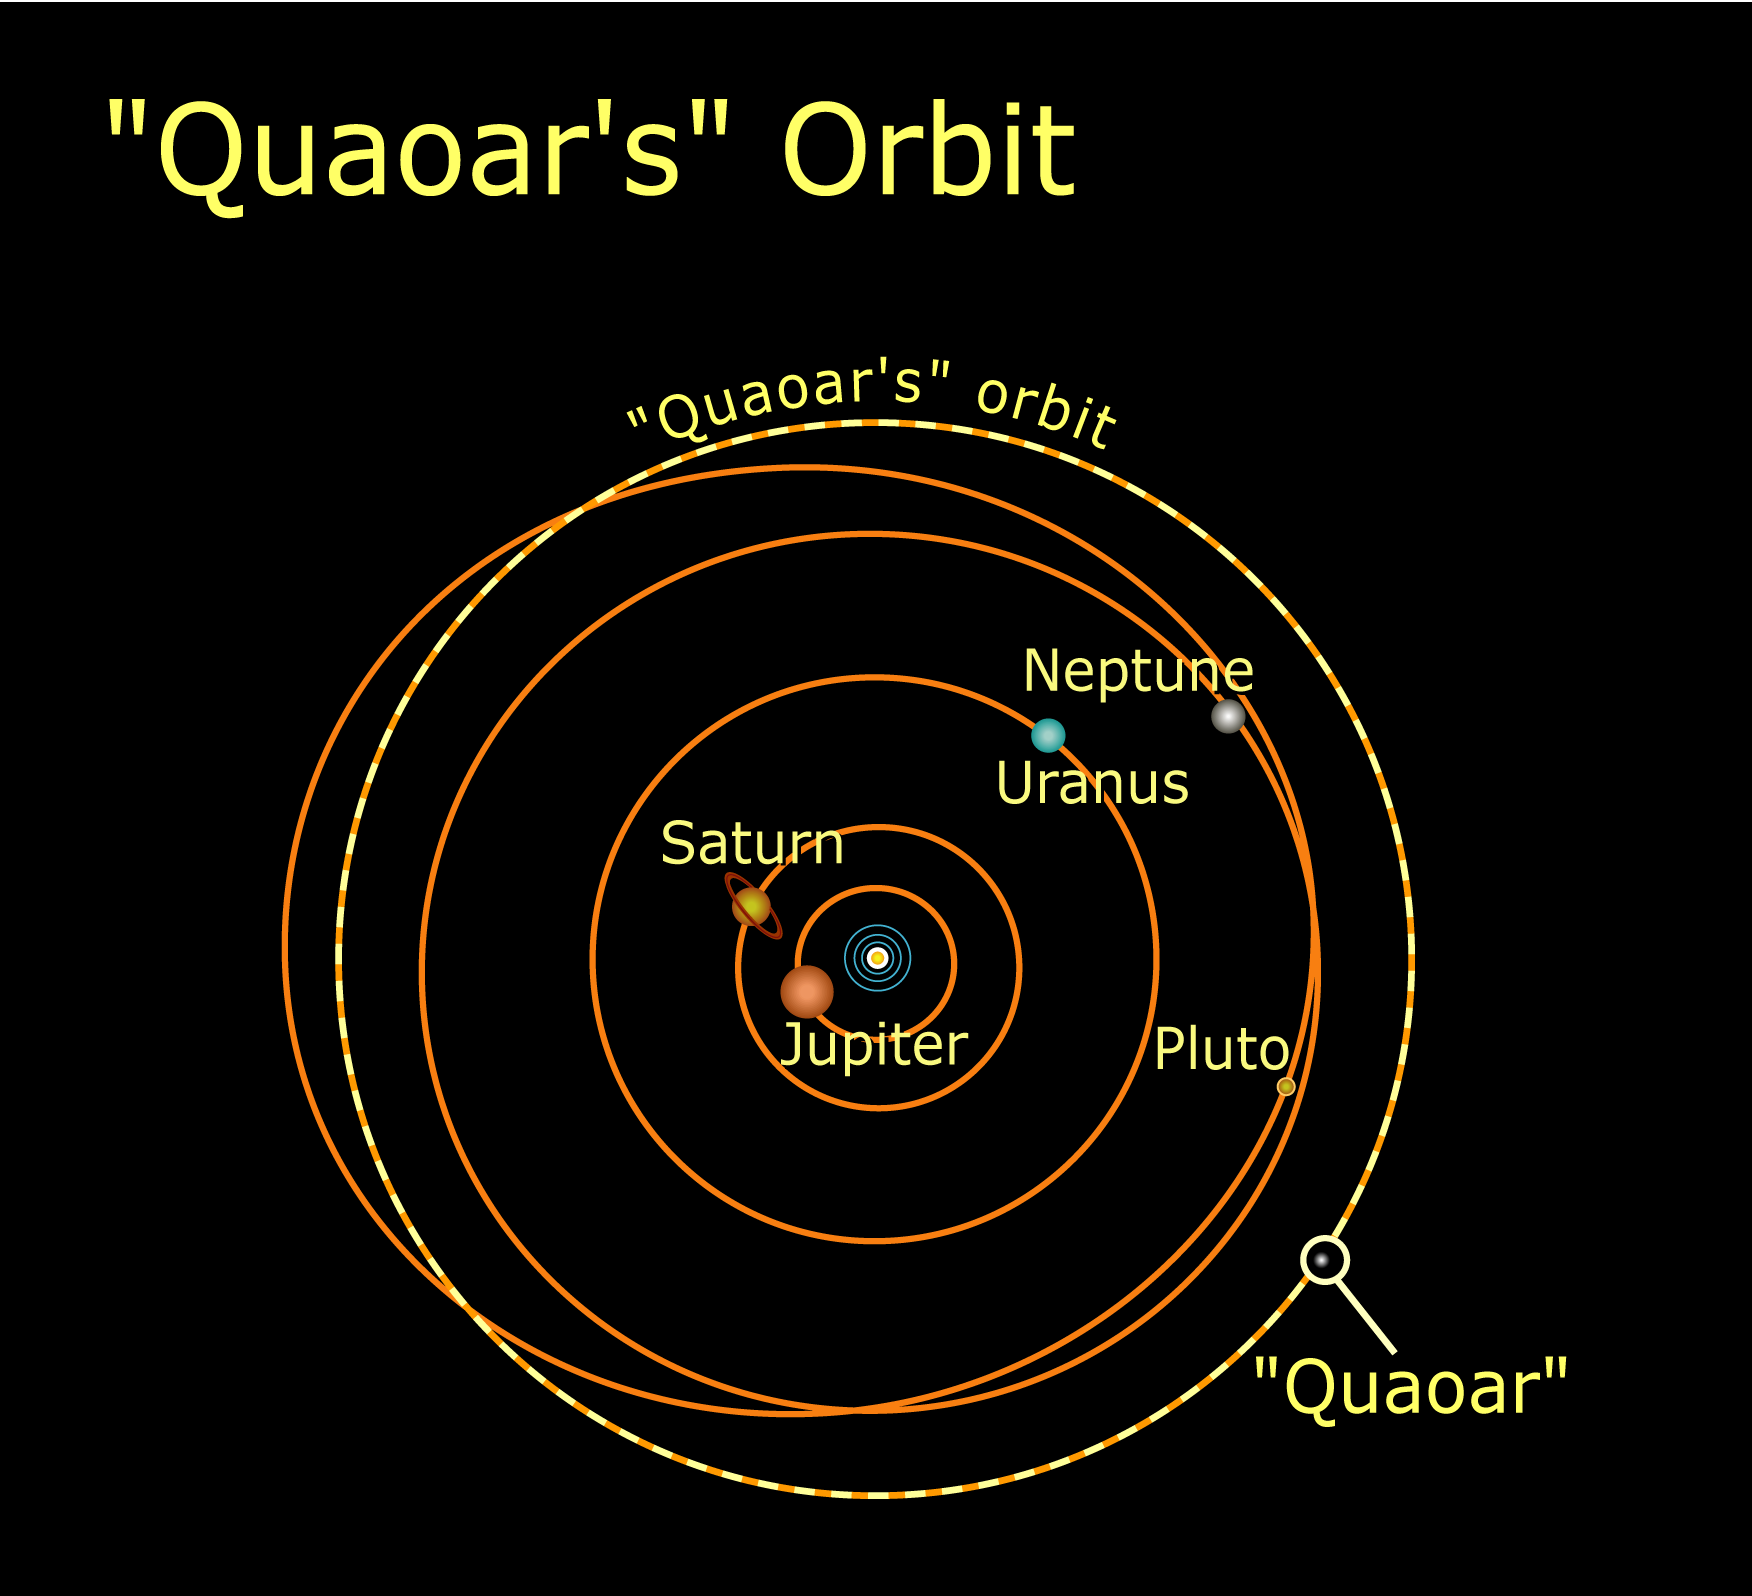

Quaoar's orbit in the Solar System

NASA's Hubble Space Telescope has measured the largest object discovered in the solar system since the discovery of Pluto 72 years ago. Approximately half the size of Pluto, the icy world is called "Quaoar" (pronounced kwa-whar). Quaoar is about 4 billion miles away, more than a billion miles farther than Pluto. Like Pluto, Quaoar dwells in the Kuiper belt, an icy belt of comet-like bodies extending 7 billion miles beyond Neptune's orbit.

Credit: NASA/ESA and A. Feild (STScI)